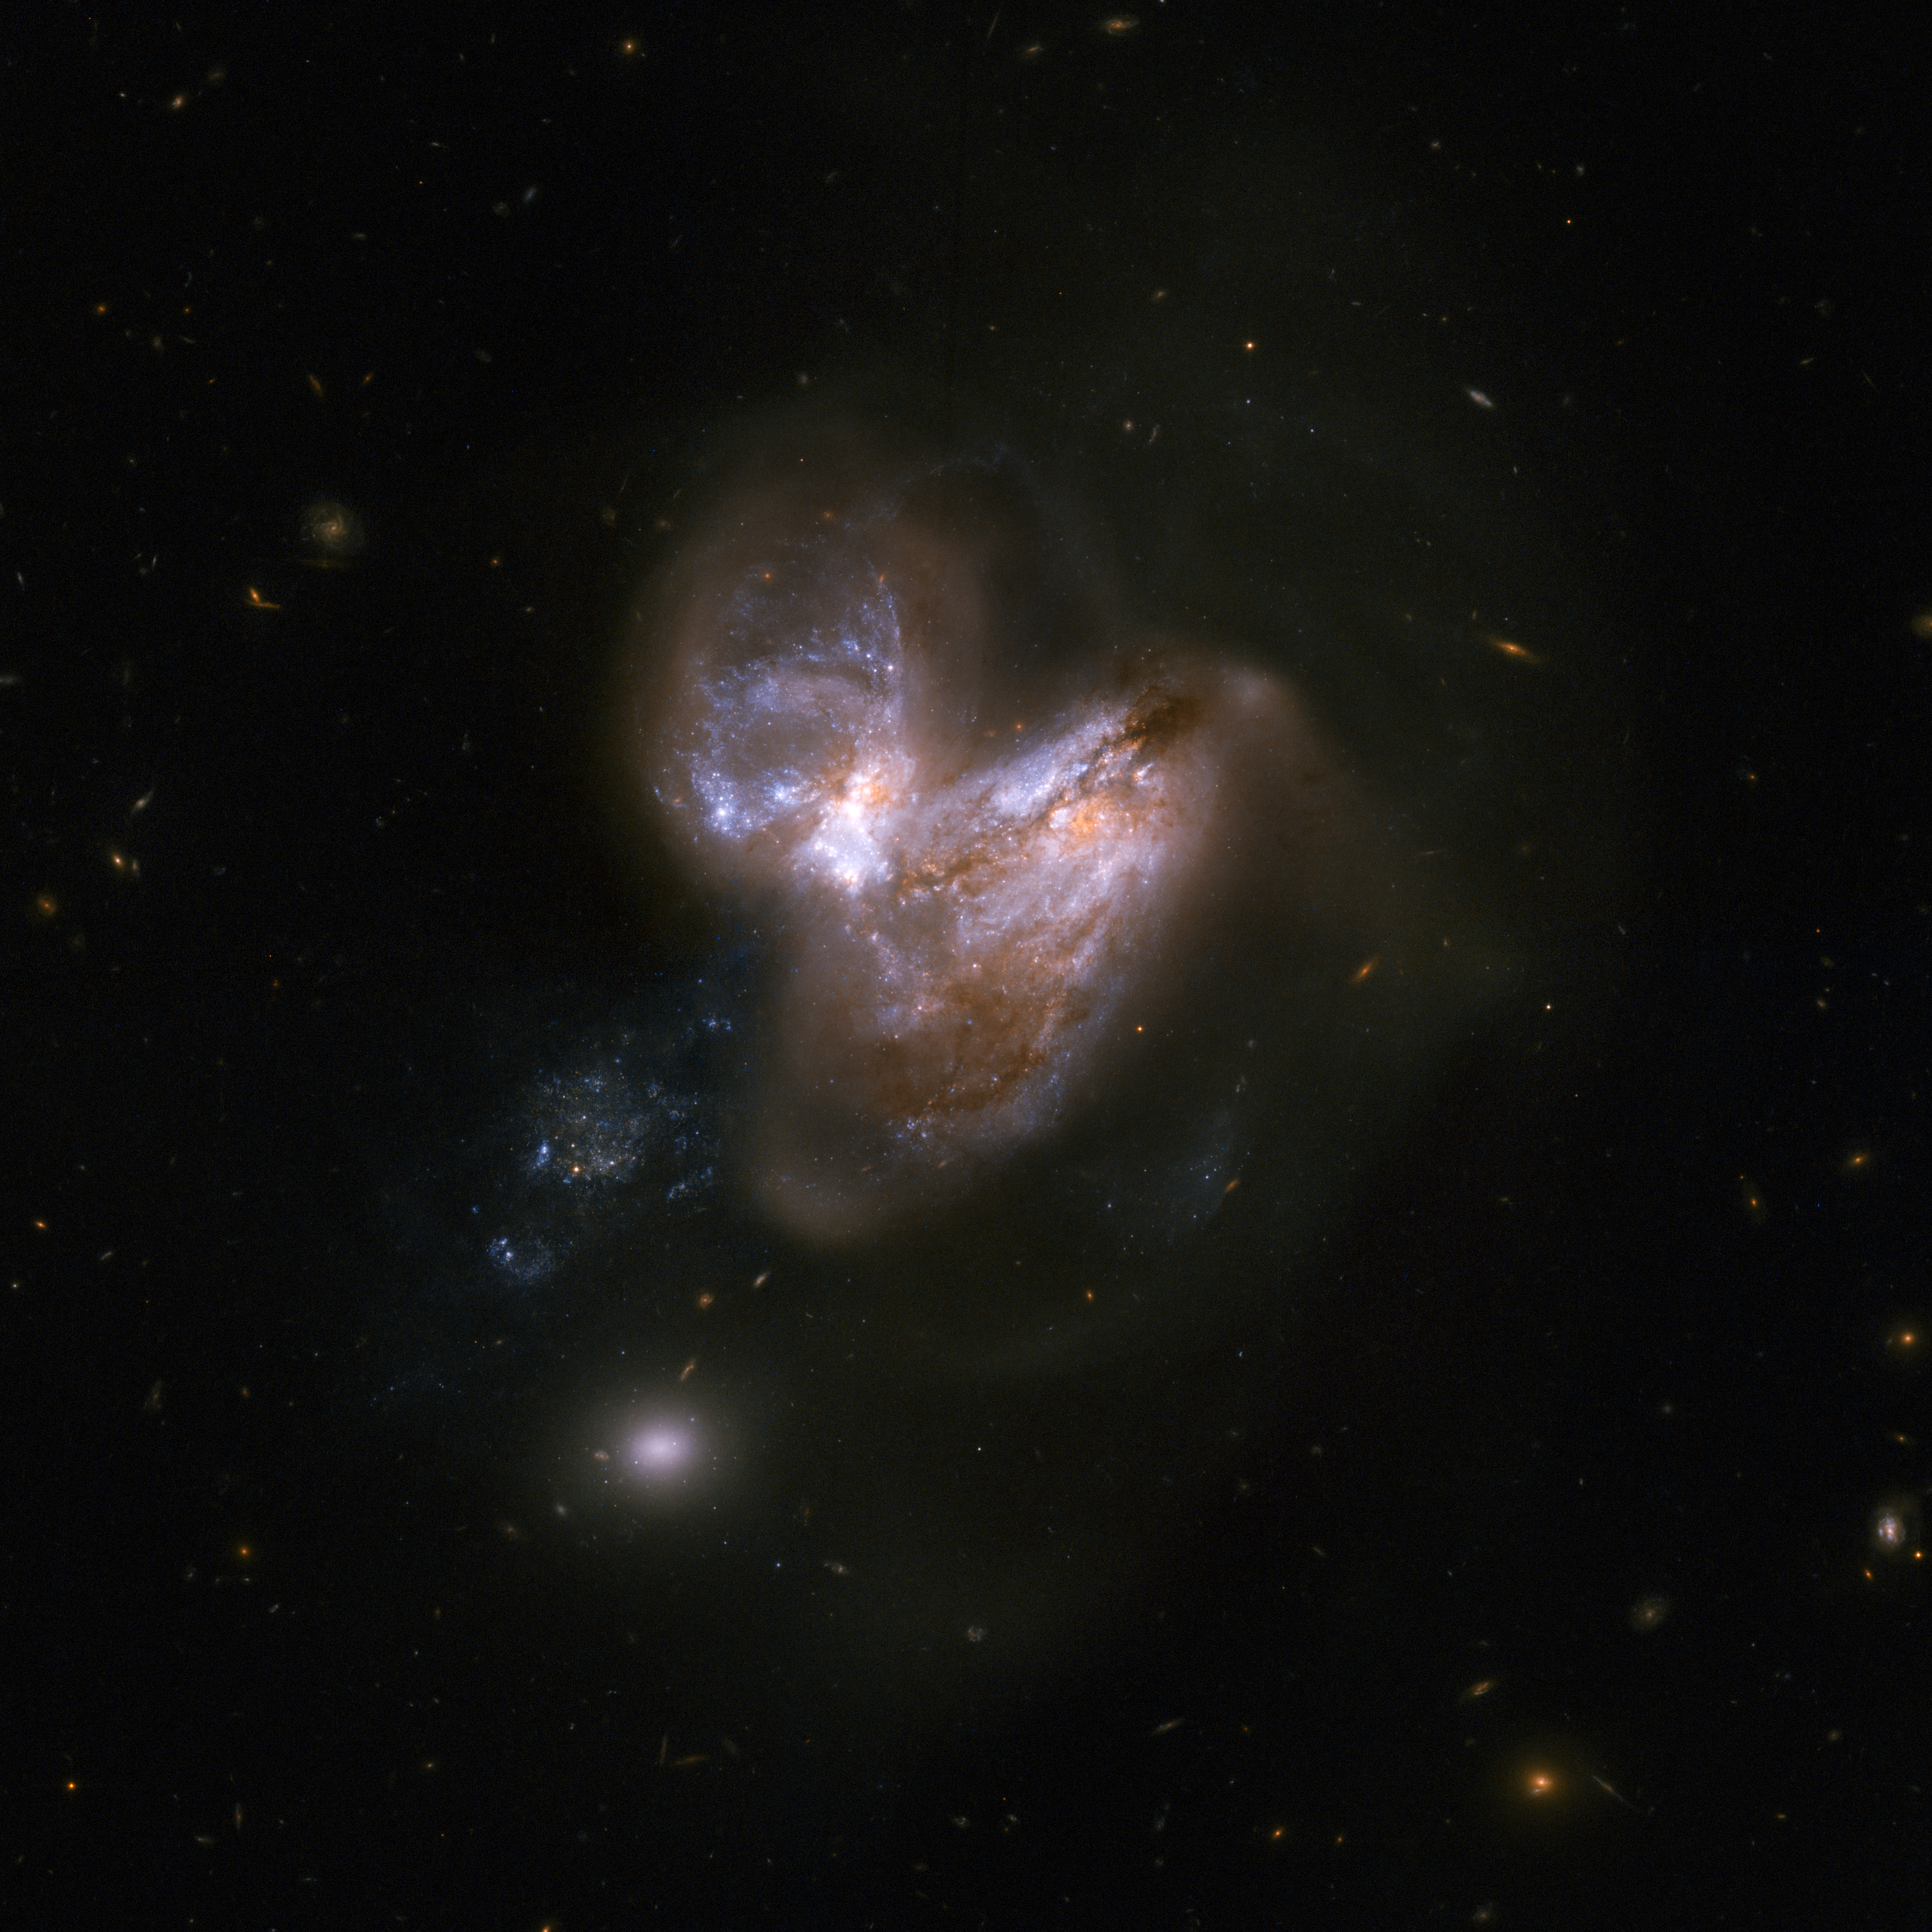

NGC 3690

This system consists of a pair of galaxies, dubbed IC 694 and NGC 3690, which made a close pass some 700 million years ago. As a result of this interaction, the system underwent a fierce burst of star formation. In the last fifteen years or so six supernovae have popped off in the outer reaches of the galaxy, making this system a distinguished supernova factory.

This image is part of a large collection of 59 images of merging galaxies taken by the Hubble Space Telescope and released on the occasion of its 18th anniversary on 24th April 2008.

Credit: NASA, ESA, the Hubble Heritage Team (STScI/AURA)-ESA/Hubble Collaboration and A. Evans (University of Virginia, Charlottesville/NRAO/Stony Brook University)